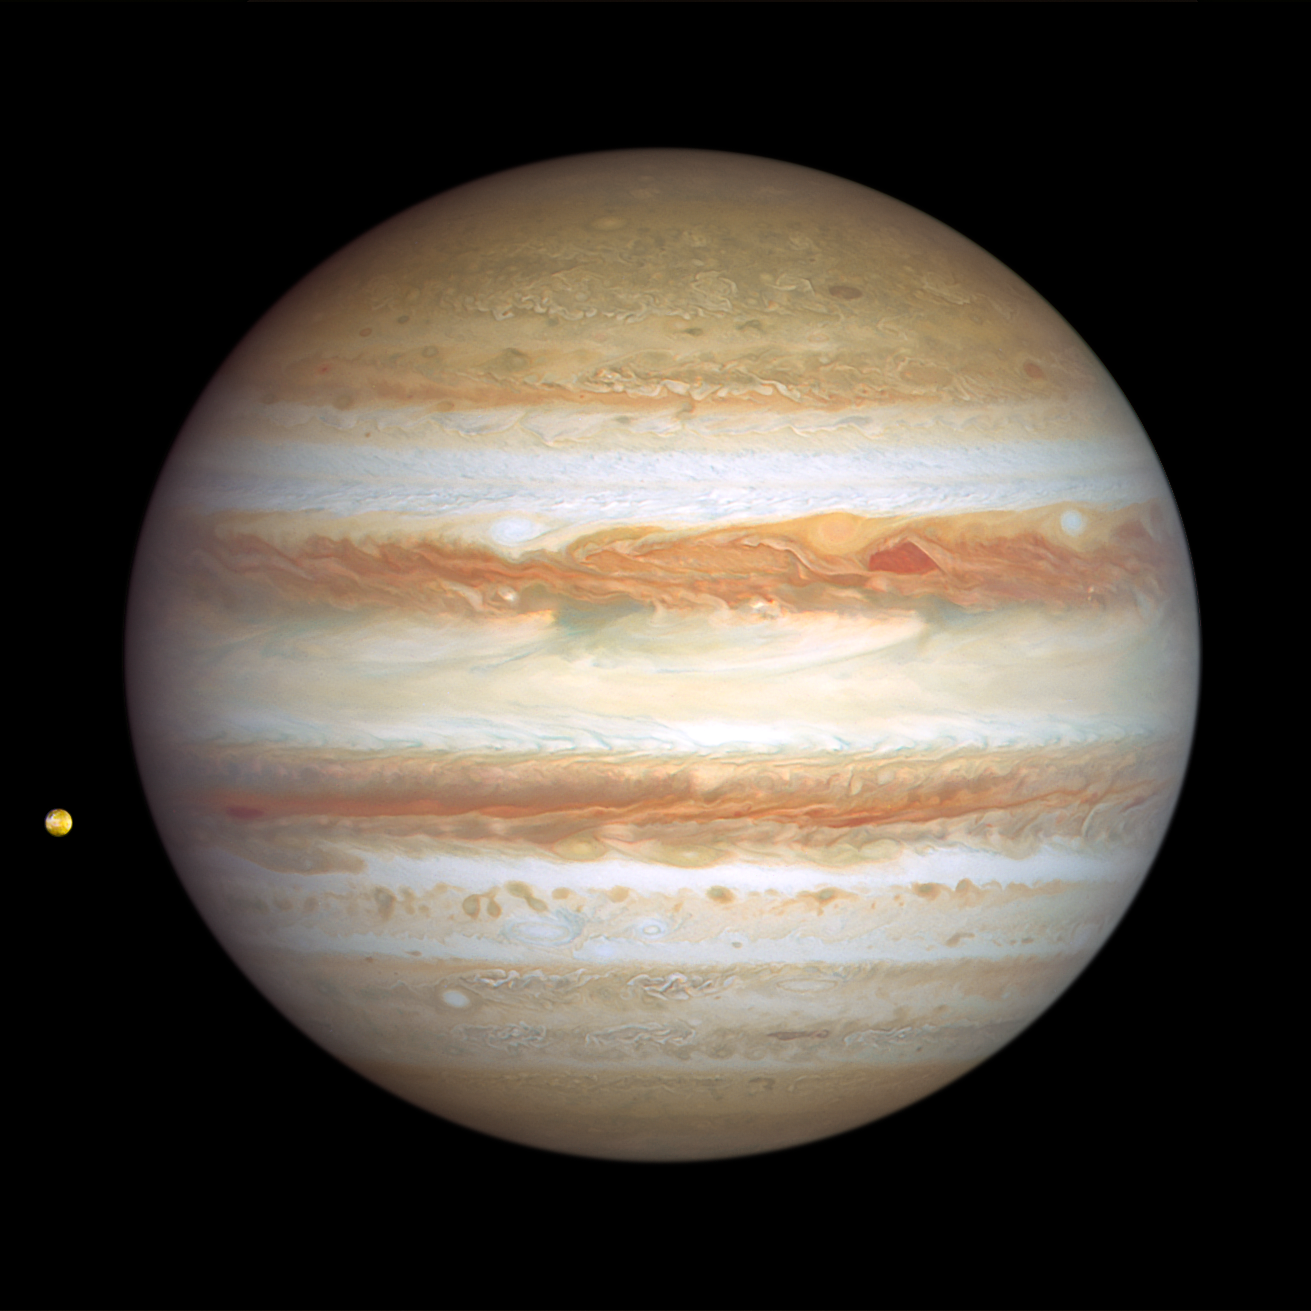

Jupiter (6 January 2024)

The giant planet Jupiter, in all its banded glory, is revisited by the NASA/ESA Hubble Space Telescope in this new image, taken on 6 January 2024, that captures both sides of the planet. Hubble monitors Jupiter and the other outer Solar System planets every year under the Outer Planet Atmospheres Legacy programme (OPAL). This is because these large worlds are shrouded in clouds and hazes stirred up by violent winds, leading to a kaleidoscope of ever-changing weather patterns.

A pair of storms is visible: a deep red cyclone and a reddish anticyclone, appear to be next to each other at right of centre. They look so red that at first glance, it looks like Jupiter skinned a knee. These storms are rotating in opposite directions, indicating an alternating pattern of high- and low-pressure systems. For the cyclone, there’s an upwelling on the edges with clouds descending in the middle causing a clearing in the atmospheric haze.

The storms are expected to bounce past each other because their opposing clockwise and counterclockwise rotations make them repel each other.

Toward the left edge of the image is the innermost Galilean moon, Io — the most volcanically active body in the Solar System, despite its small size (only slightly larger than Earth's moon). Hubble resolves volcanic outflow deposits on the surface. Hubble's sensitivity to blue and violet wavelengths clearly reveals interesting surface features.

Credit: NASA, ESA, J. DePasquale (STScI), A. Simon (NASA-GSFC)